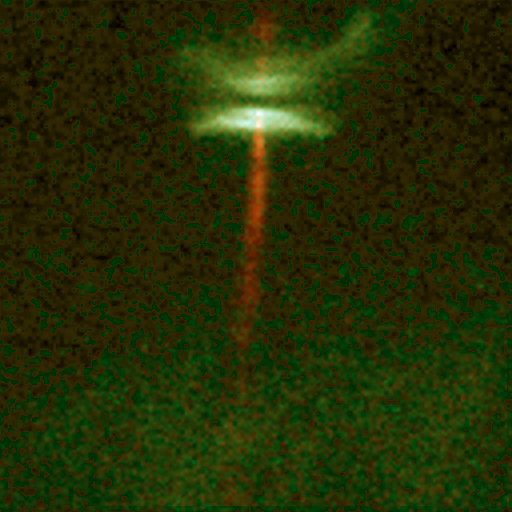

Jet from Young Star (HH-30)

This view of a protostellar object called HH-30 reveals an edge-on disk of dust encircling a newly forming star. Light from the forming star illuminates the top and bottom surfaces of the disk, making them visible, while the star itself is hidden behind the densest parts of the disk. The reddish jet emanates from the inner region of the disk, and possibly directly from the star itself.

Hubble's detailed view shows, for the first time, that the jet expands for several billion miles from the star, but then stays confined to a narrow beam. The protostar is 450 light-years away in the constellation Taurus.

Credit: C. Burrows (STScI & ESA), the WFPC 2 Investigation Definition Team, and NASA